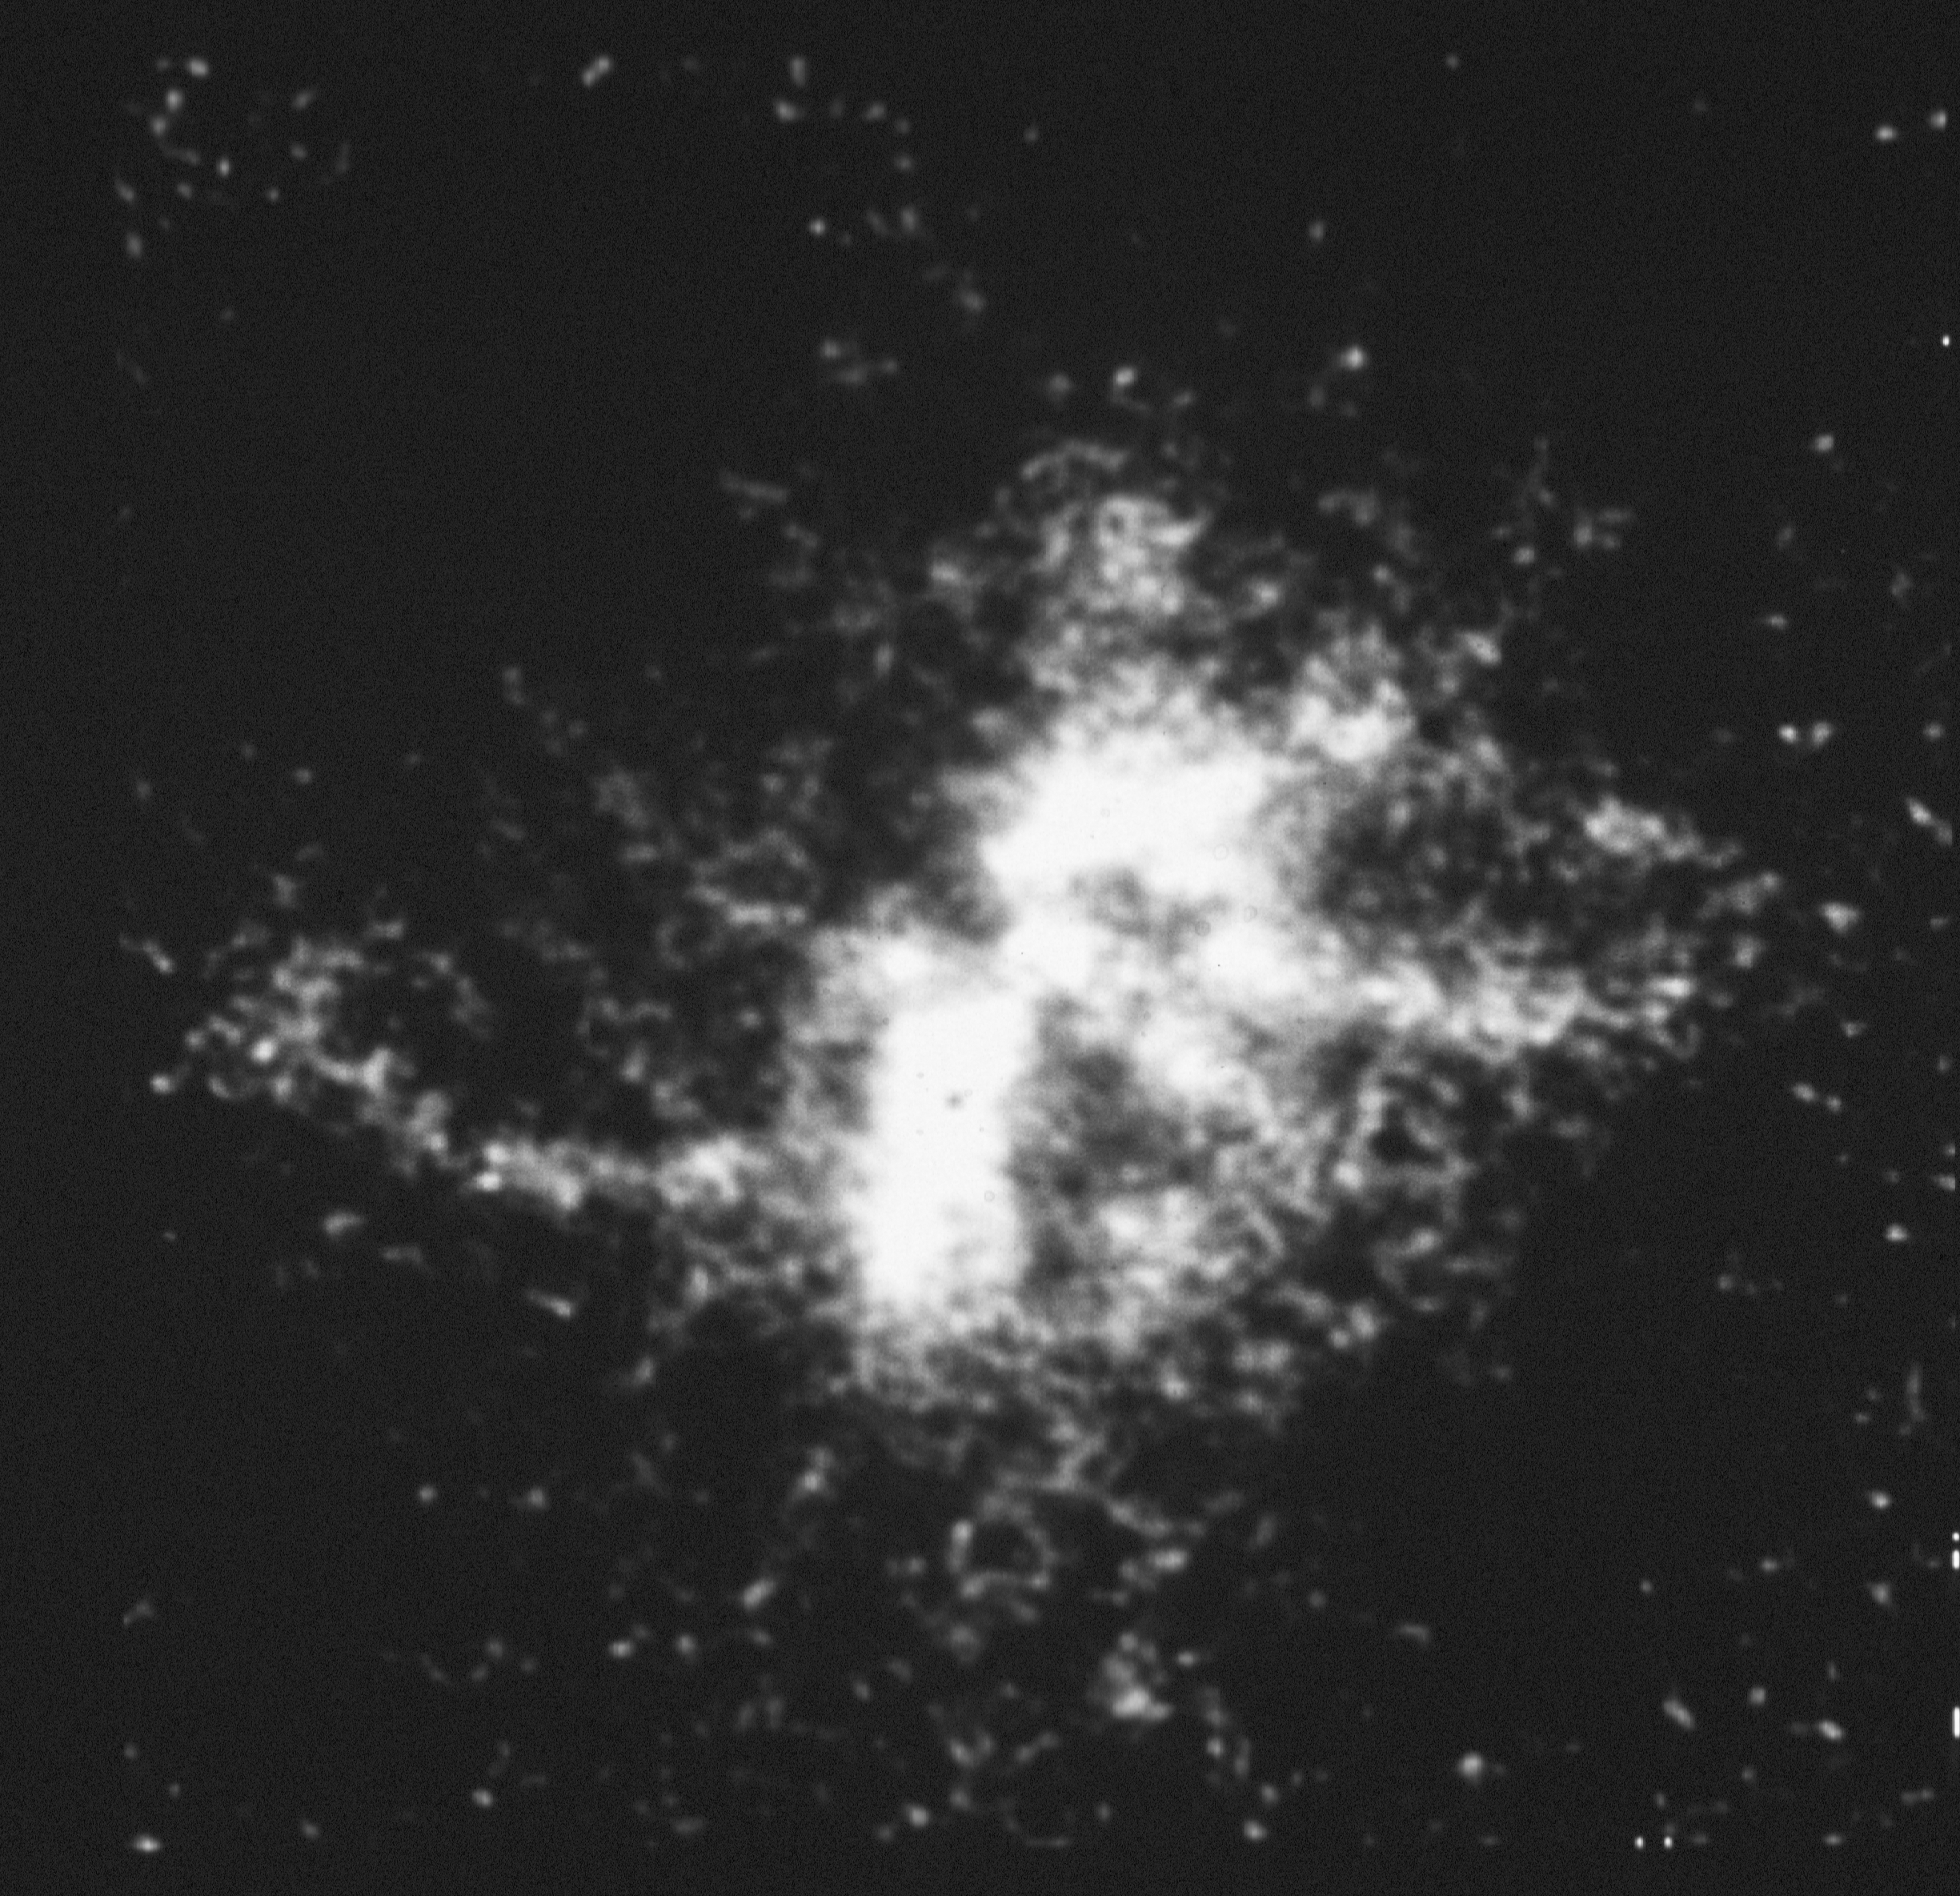

A planetary Nebula (N66) in the Large Magellanic Cloud

The NASA/ESA Hubble Space Telescope href="http://www.spacetelescope.org/about/index.html">HST) has imaged N66, a planetary nebula in the Large Magellanic Cloud (a satellite galaxy of our own Milky Way galaxy). The image was obtained at 10:41 p.m. EDT on June 26, 1991, using the European Space Agency's Faint Object Camera. This HST image is being presented on Thursday, January 16 at the 179th meeting of the American Astronomical Society in Atlanta, Georgia. This is the first time a planetary nebula has ever been seen so clearly in a galaxy beyond our own Milky Way. The nebula N66 is located 169,000 light-years away. The FOC image reveals complex structures and details as small as 0.08 light-years across (0.1 arcsecond resolution). None of these structures had ever been seen with ground-based telescopes. Although such an asymmetric structure had been anticipated based upon spectroscopic data taken with ground-based telescopes, the observed patterns are unprecedented. The FOC exposure lasted for just 540 seconds and was made through a filter which isolated the light of doubly ionized oxygen (5007 Angstroms). The image has been sharpened by computer image reconstruction, though all the structures are clearly evident in the raw image. The brightest part of the nebula has an angular diameter of about 2.4 arcseconds, which corresponds to a size of 1.9 light-years. The nebula was ejected by a luminous red giant star, which subsequently contracted to form a blue remnant star. Located at the center of the image, this remnant star ionizes the nebula, causing it to glow at visible and ultraviolet wavelengths. The star is destined to become a white dwarf. Individual lobes of the nebulosity are expanding from the center with velocities of up to one quarter million miles per hour (100 kilometers per second).

Credit: J.C. Blades/NASA/ESA